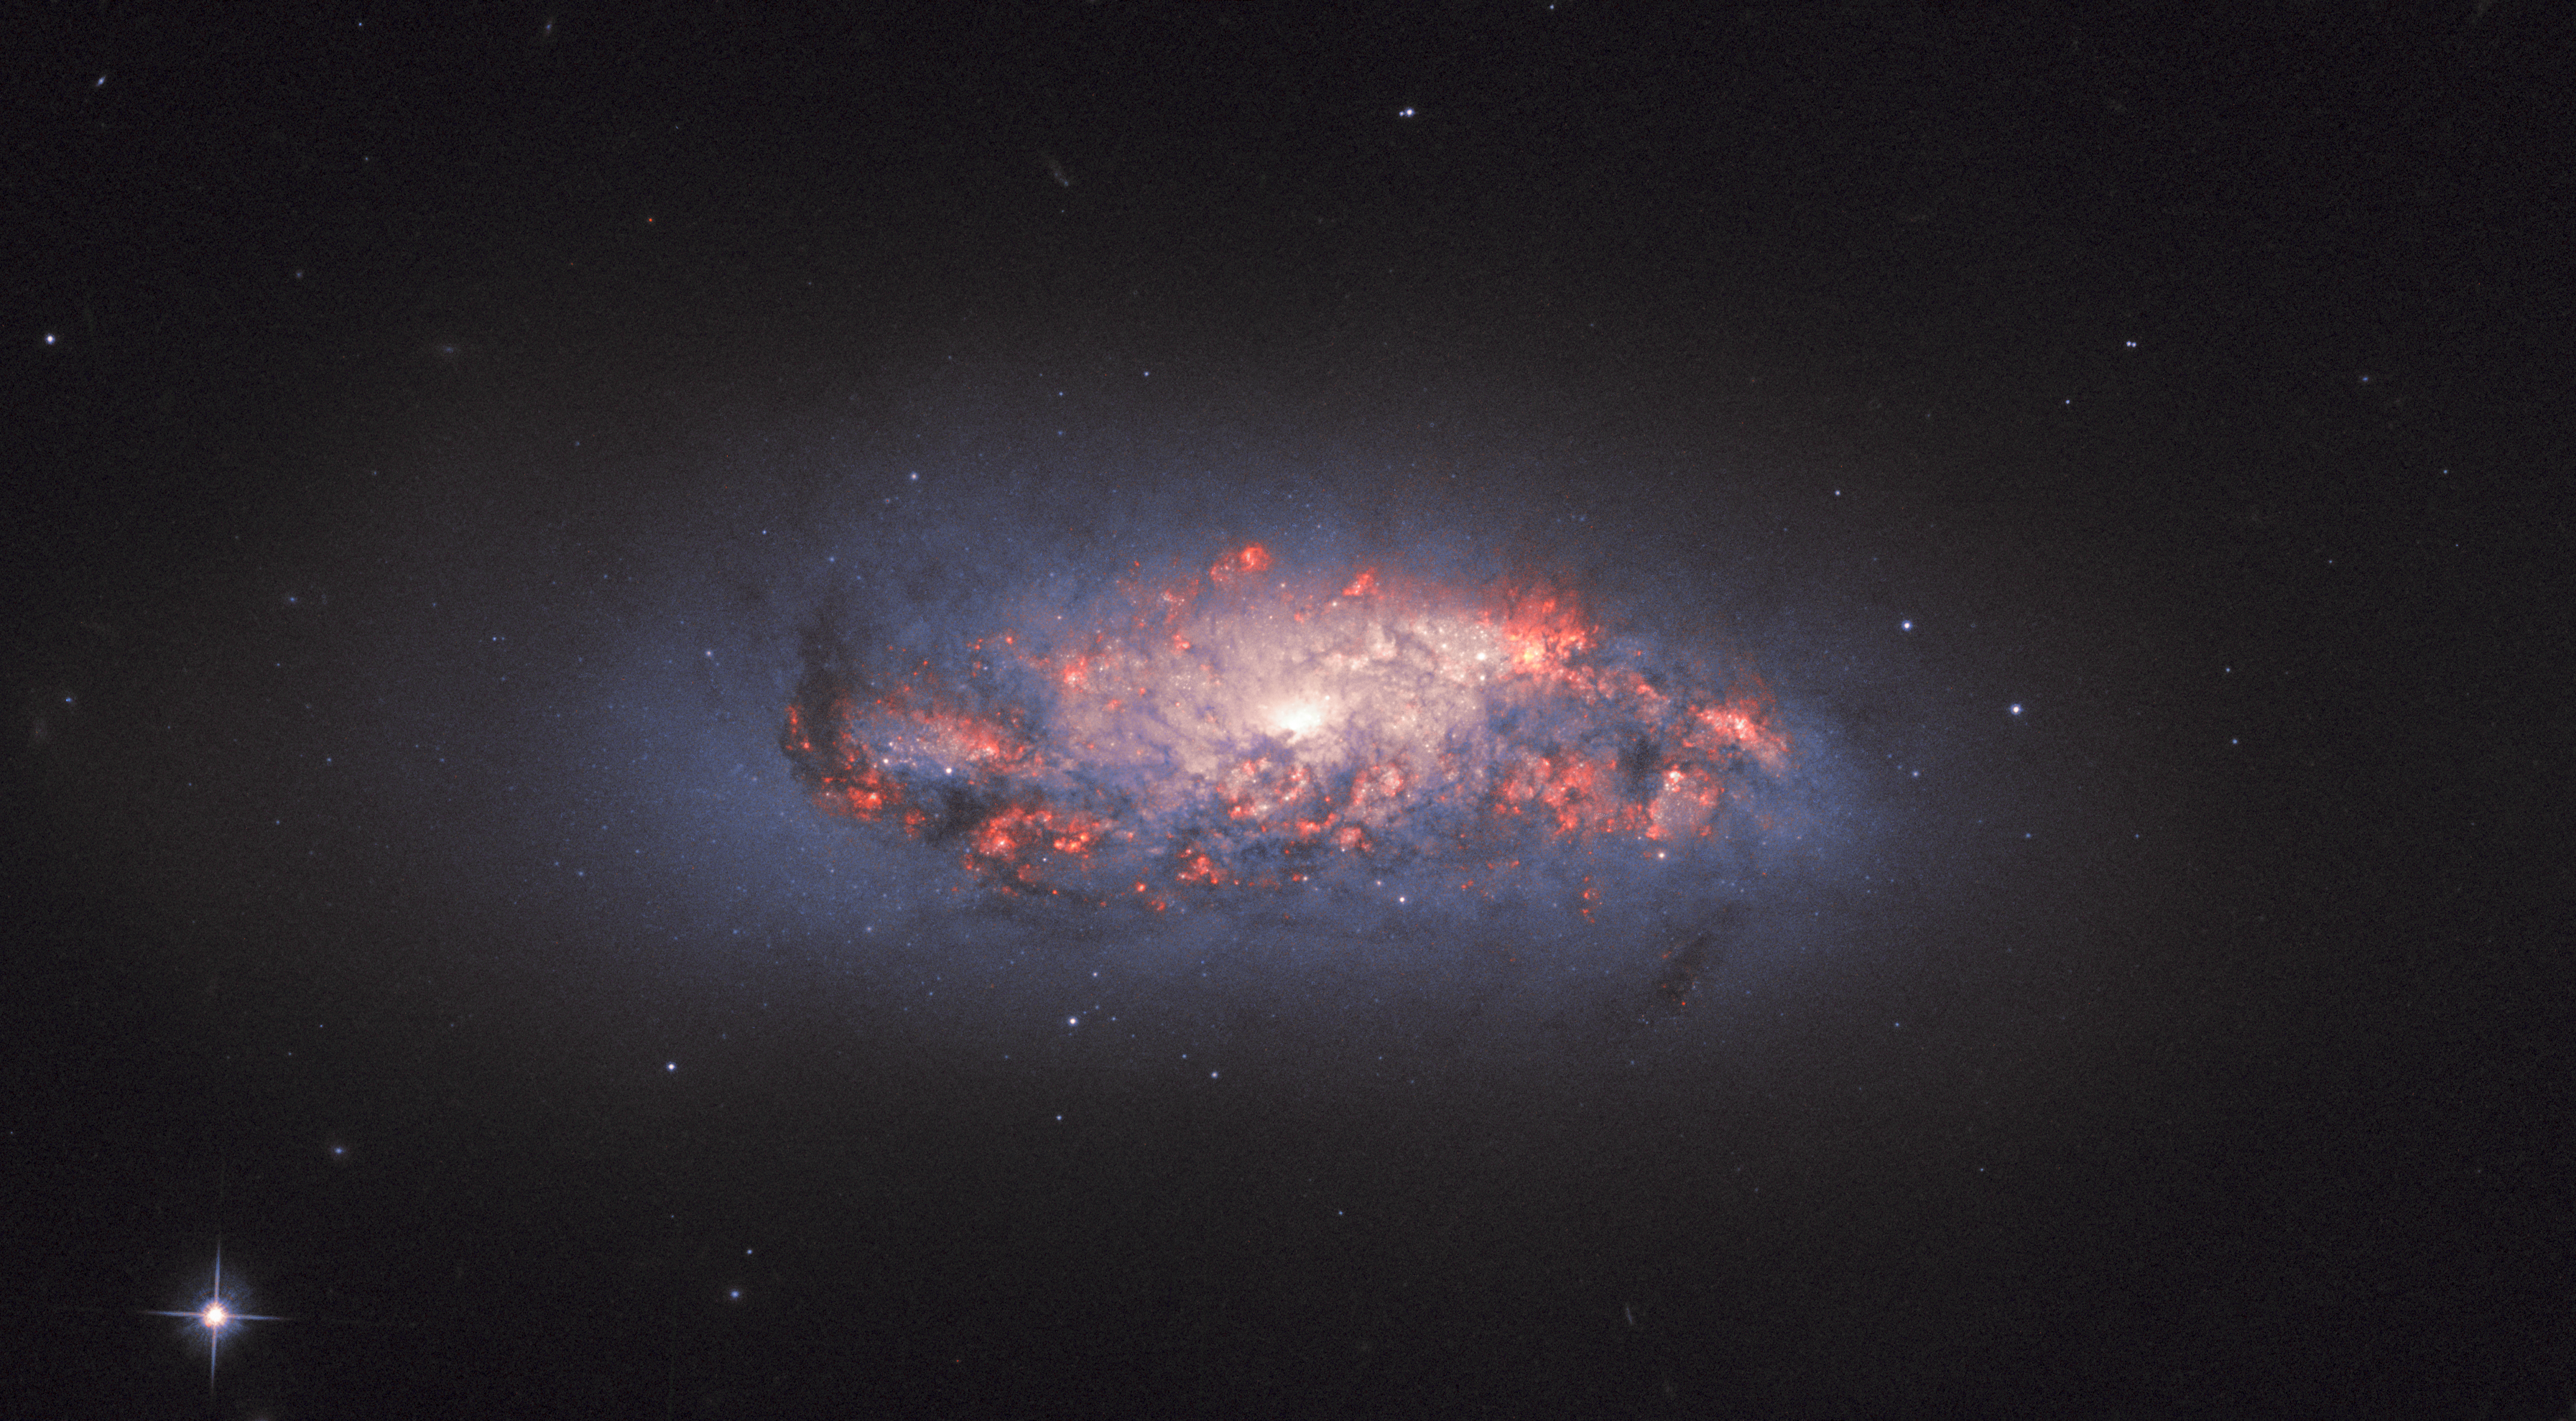

In Bloom

This NASA/ESA Hubble Space Telescope Picture of the Week shows bright, colourful pockets of star formation blooming like roses in a spiral galaxy named NGC 972.

The orange-pink glow is created as hydrogen gas reacts to the intense light streaming outwards from nearby newborn stars; these bright patches can be seen here amid dark, tangled streams of cosmic dust.

Astronomers look for these telltale signs of star formation when they study galaxies throughout the cosmos, as star formation rates, locations, and histories offer critical clues as to how these colossal collections of gas and dust have evolved over time. New generations of stars contribute to — and are also, in turn, influenced by — the broader forces and factors that mould galaxies throughout the Universe, such as gravity, radiation, matter, and dark matter.

German-British astronomer William Herschel is credited with the discovery of NGC 972 in 1784. Astronomers have since measured its distance, finding it to be just under 70 million light-years.

Credit: ESA/Hubble, NASA, L. Ho